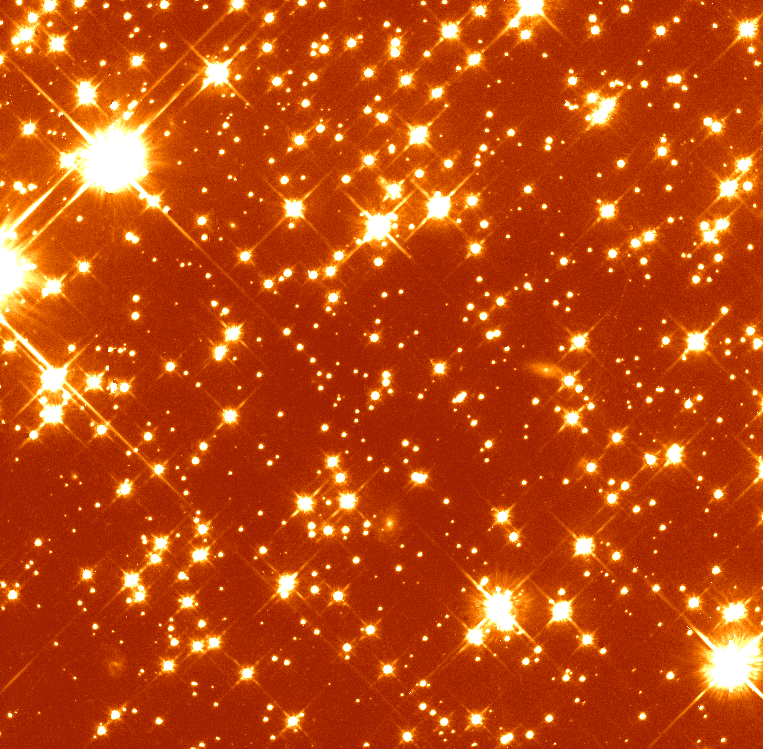

Globular Cluster NGC 6397

This is an image of the globular cluster NGC 6397, one of the nearest and densest agglomerations of stars to Earth. The cluster is located 7.200 light-years away in the southern constellation Ara, and is one of 150 such objects which orbit our Milky Way Galaxy.

Credit: Guido de Marchi, ESA, F. Paresce and NASA